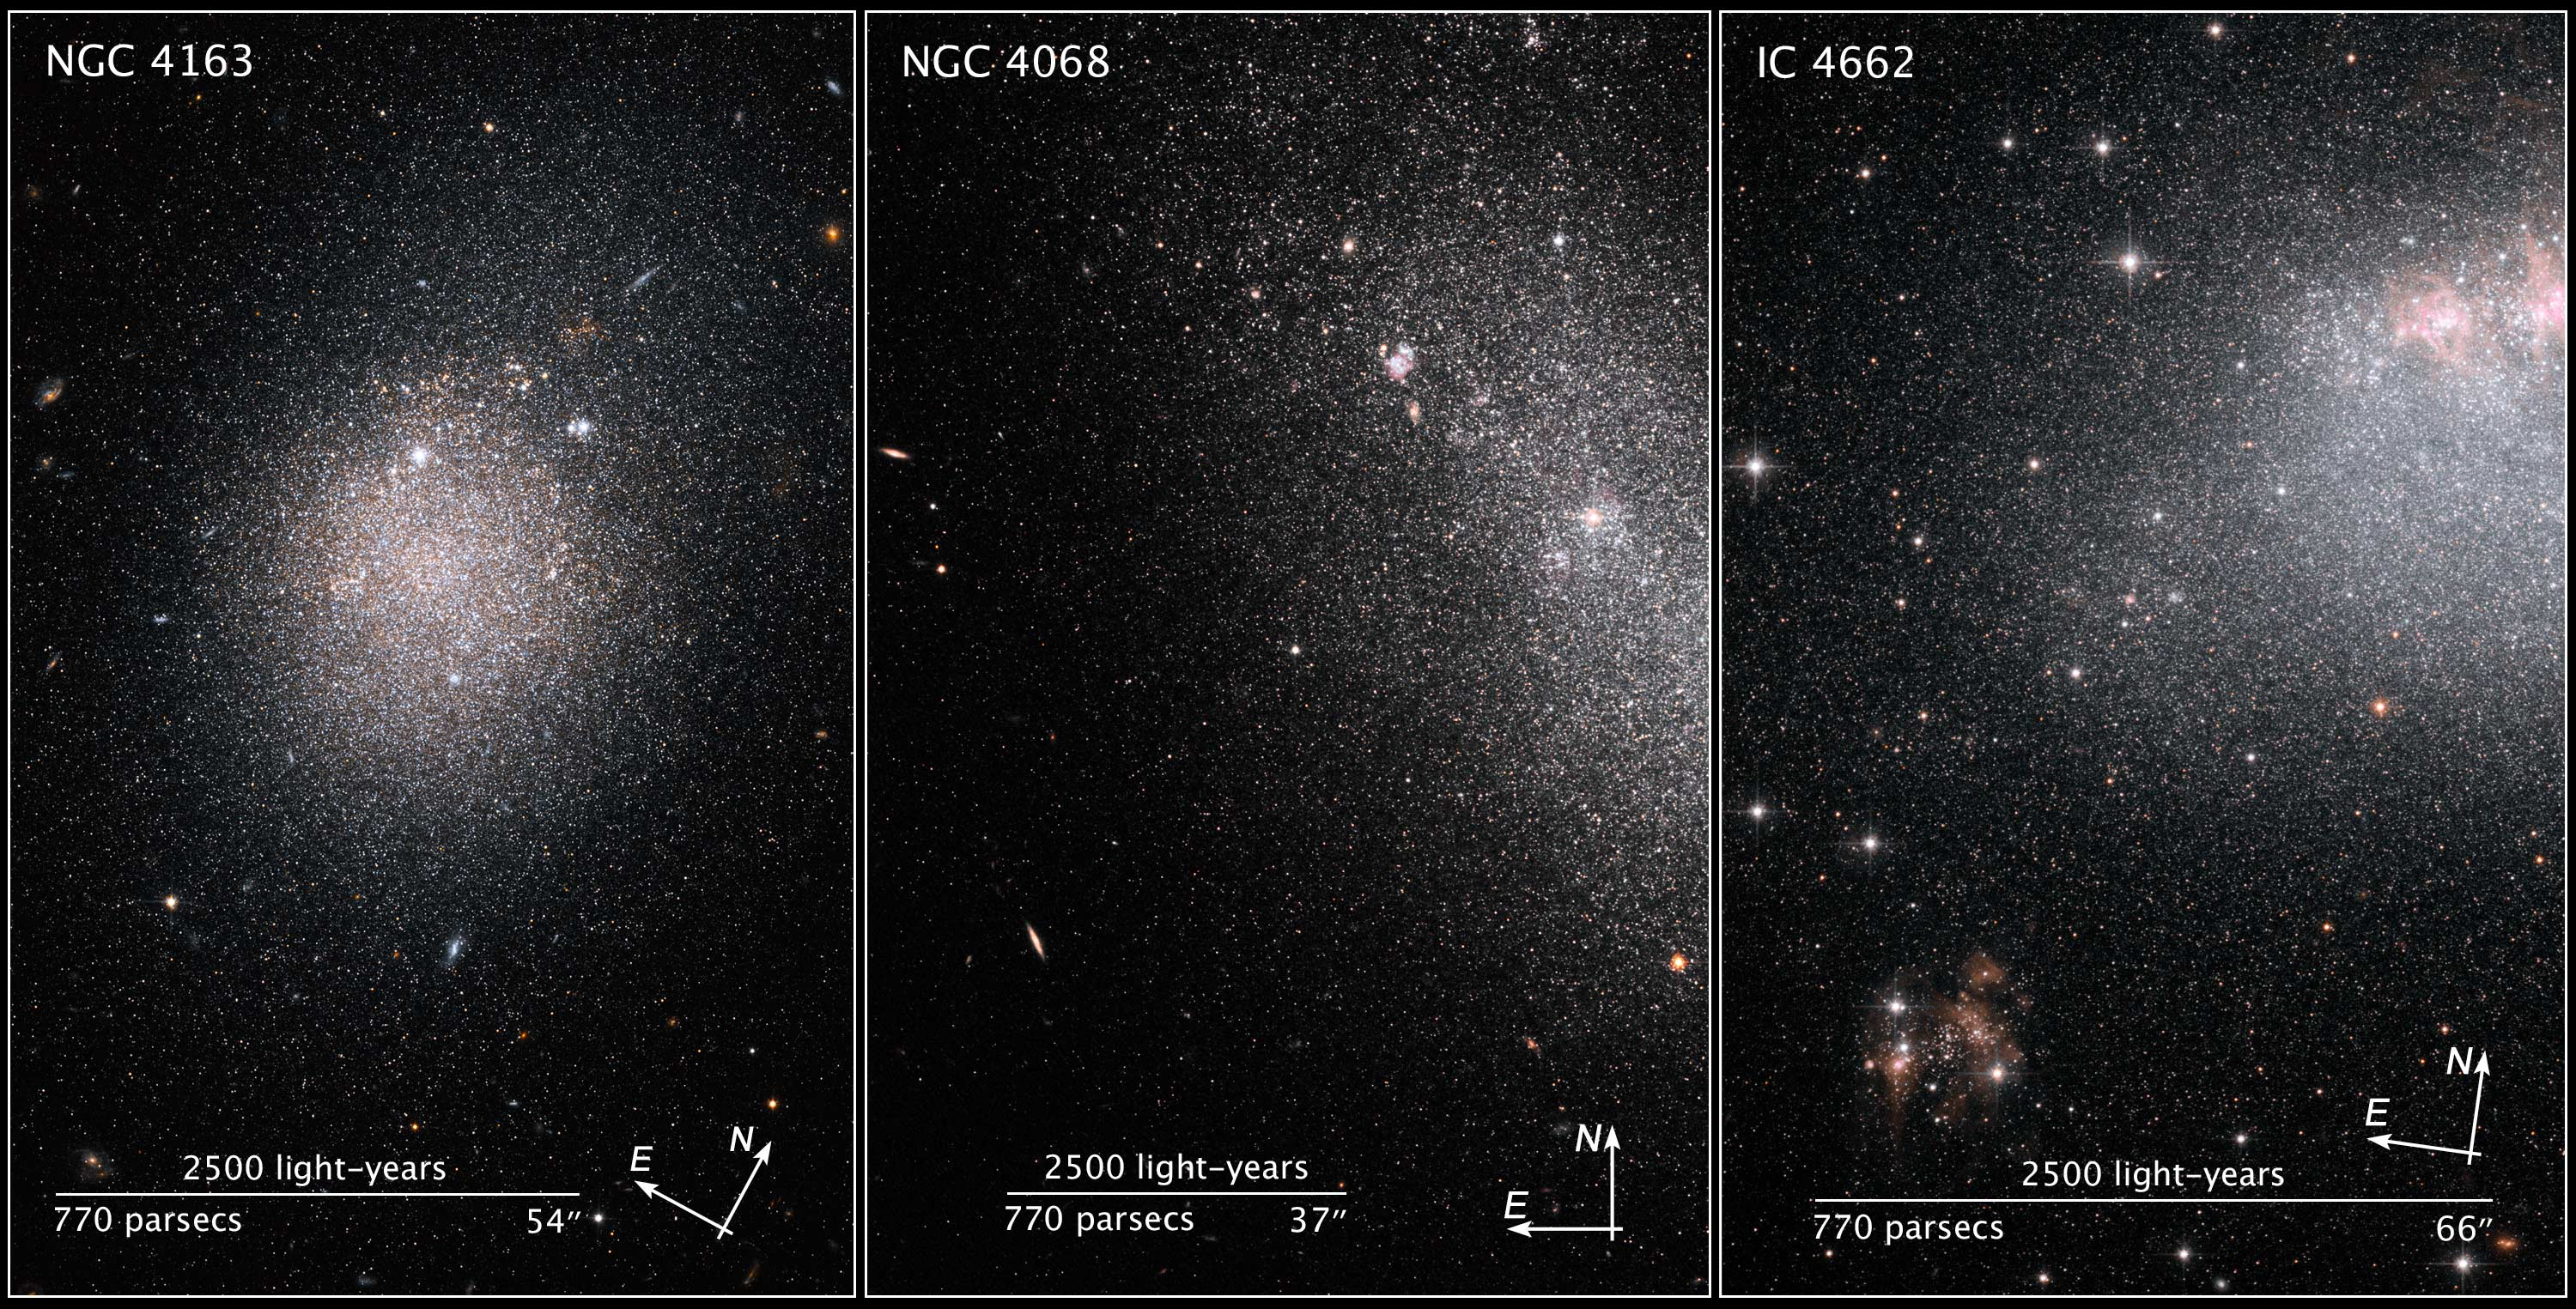

Compass and scale image of starburst galaxies

These images, taken by the NASA/ESA Hubble Space Telescope, show myriad stars residing in the central regions of the three dwarf galaxies NGC 4163, NGC 4068, and IC 4662.

The bluish dots are younger stars; the reddish dots, older stars. The irregularly shaped red blobs in the images of NGC 4163 and IC 4662 are regions of current starburst activity. Starbursts are areas of intense star formation.

The three galaxies are part of a Hubble study of starbursts in nearby, small, or dwarf, galaxies. Based on this study, astronomers have found that starbursts continue 100 times longer than first thought, lasting 200 million to 400 million years. These galaxies show that starbursts are not isolated events, but sweep across a galaxy.

Each of the three starburst galaxies has a different shape. The collection of stars in NGC 4163 is more spherical, with a higher concentration of stars forming in the center. By contrast, the grouping of stars in NGC 4068 is more elongated and has fewer new stars than the other two galaxies. Astronomers think the starburst in this galaxy is ending. In the image of IC 4662 the clumpy red blobs peppered throughout the galaxy indicate active regions of star birth. One such region extends off the image's top, right edge. This galaxy exhibits the strongest star formation of the three galaxies in the study.

The distances of the galaxies range from 8 million to 14 million light-years away.

The images were taken in 2004 by the Advanced Camera for Surveys.

Credit: NASA, ESA and Z. Levay (STScI). Credit: NASA, ESA and K. McQuinn (University of Minnesota, Minneapolis)